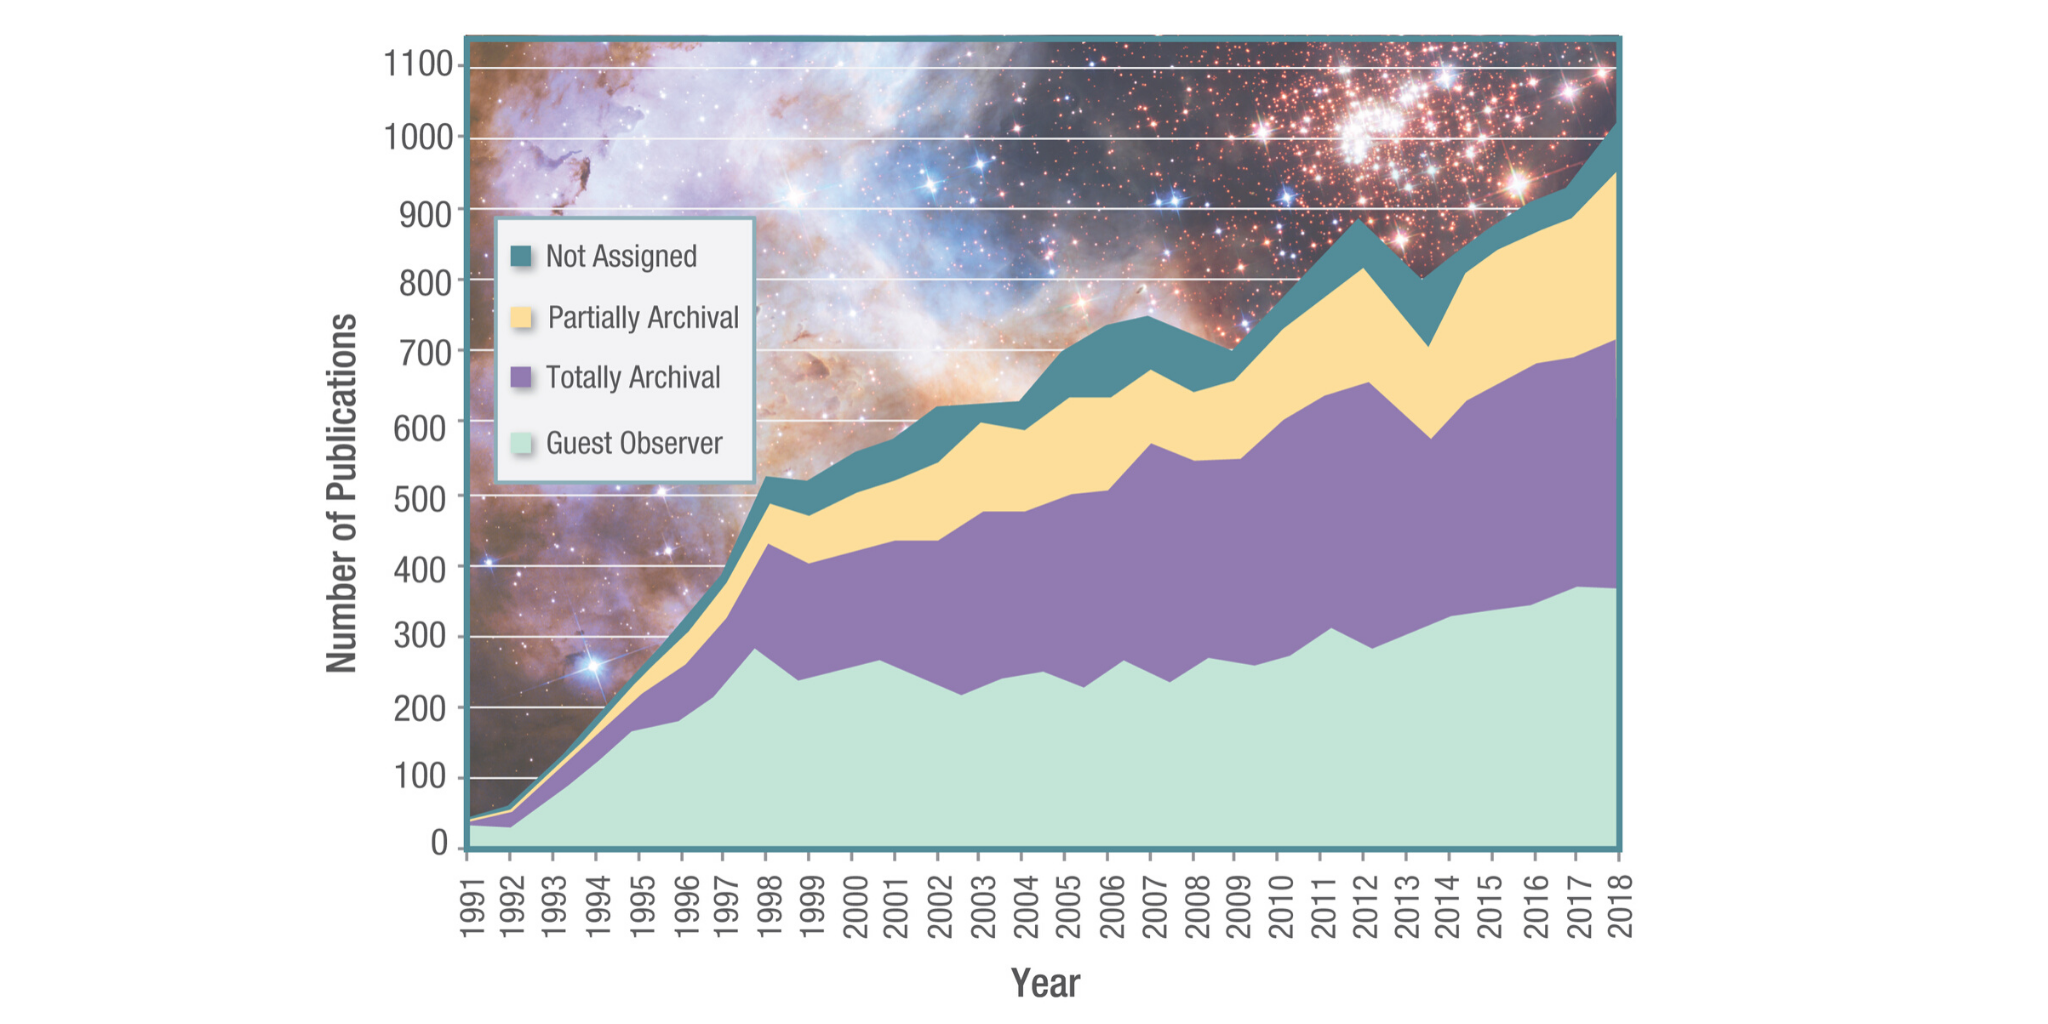

Hubble Publications

This graph details the Hubble Space Telescope’s publication results from 1991 to 2018.

Credit: NASA & ESA